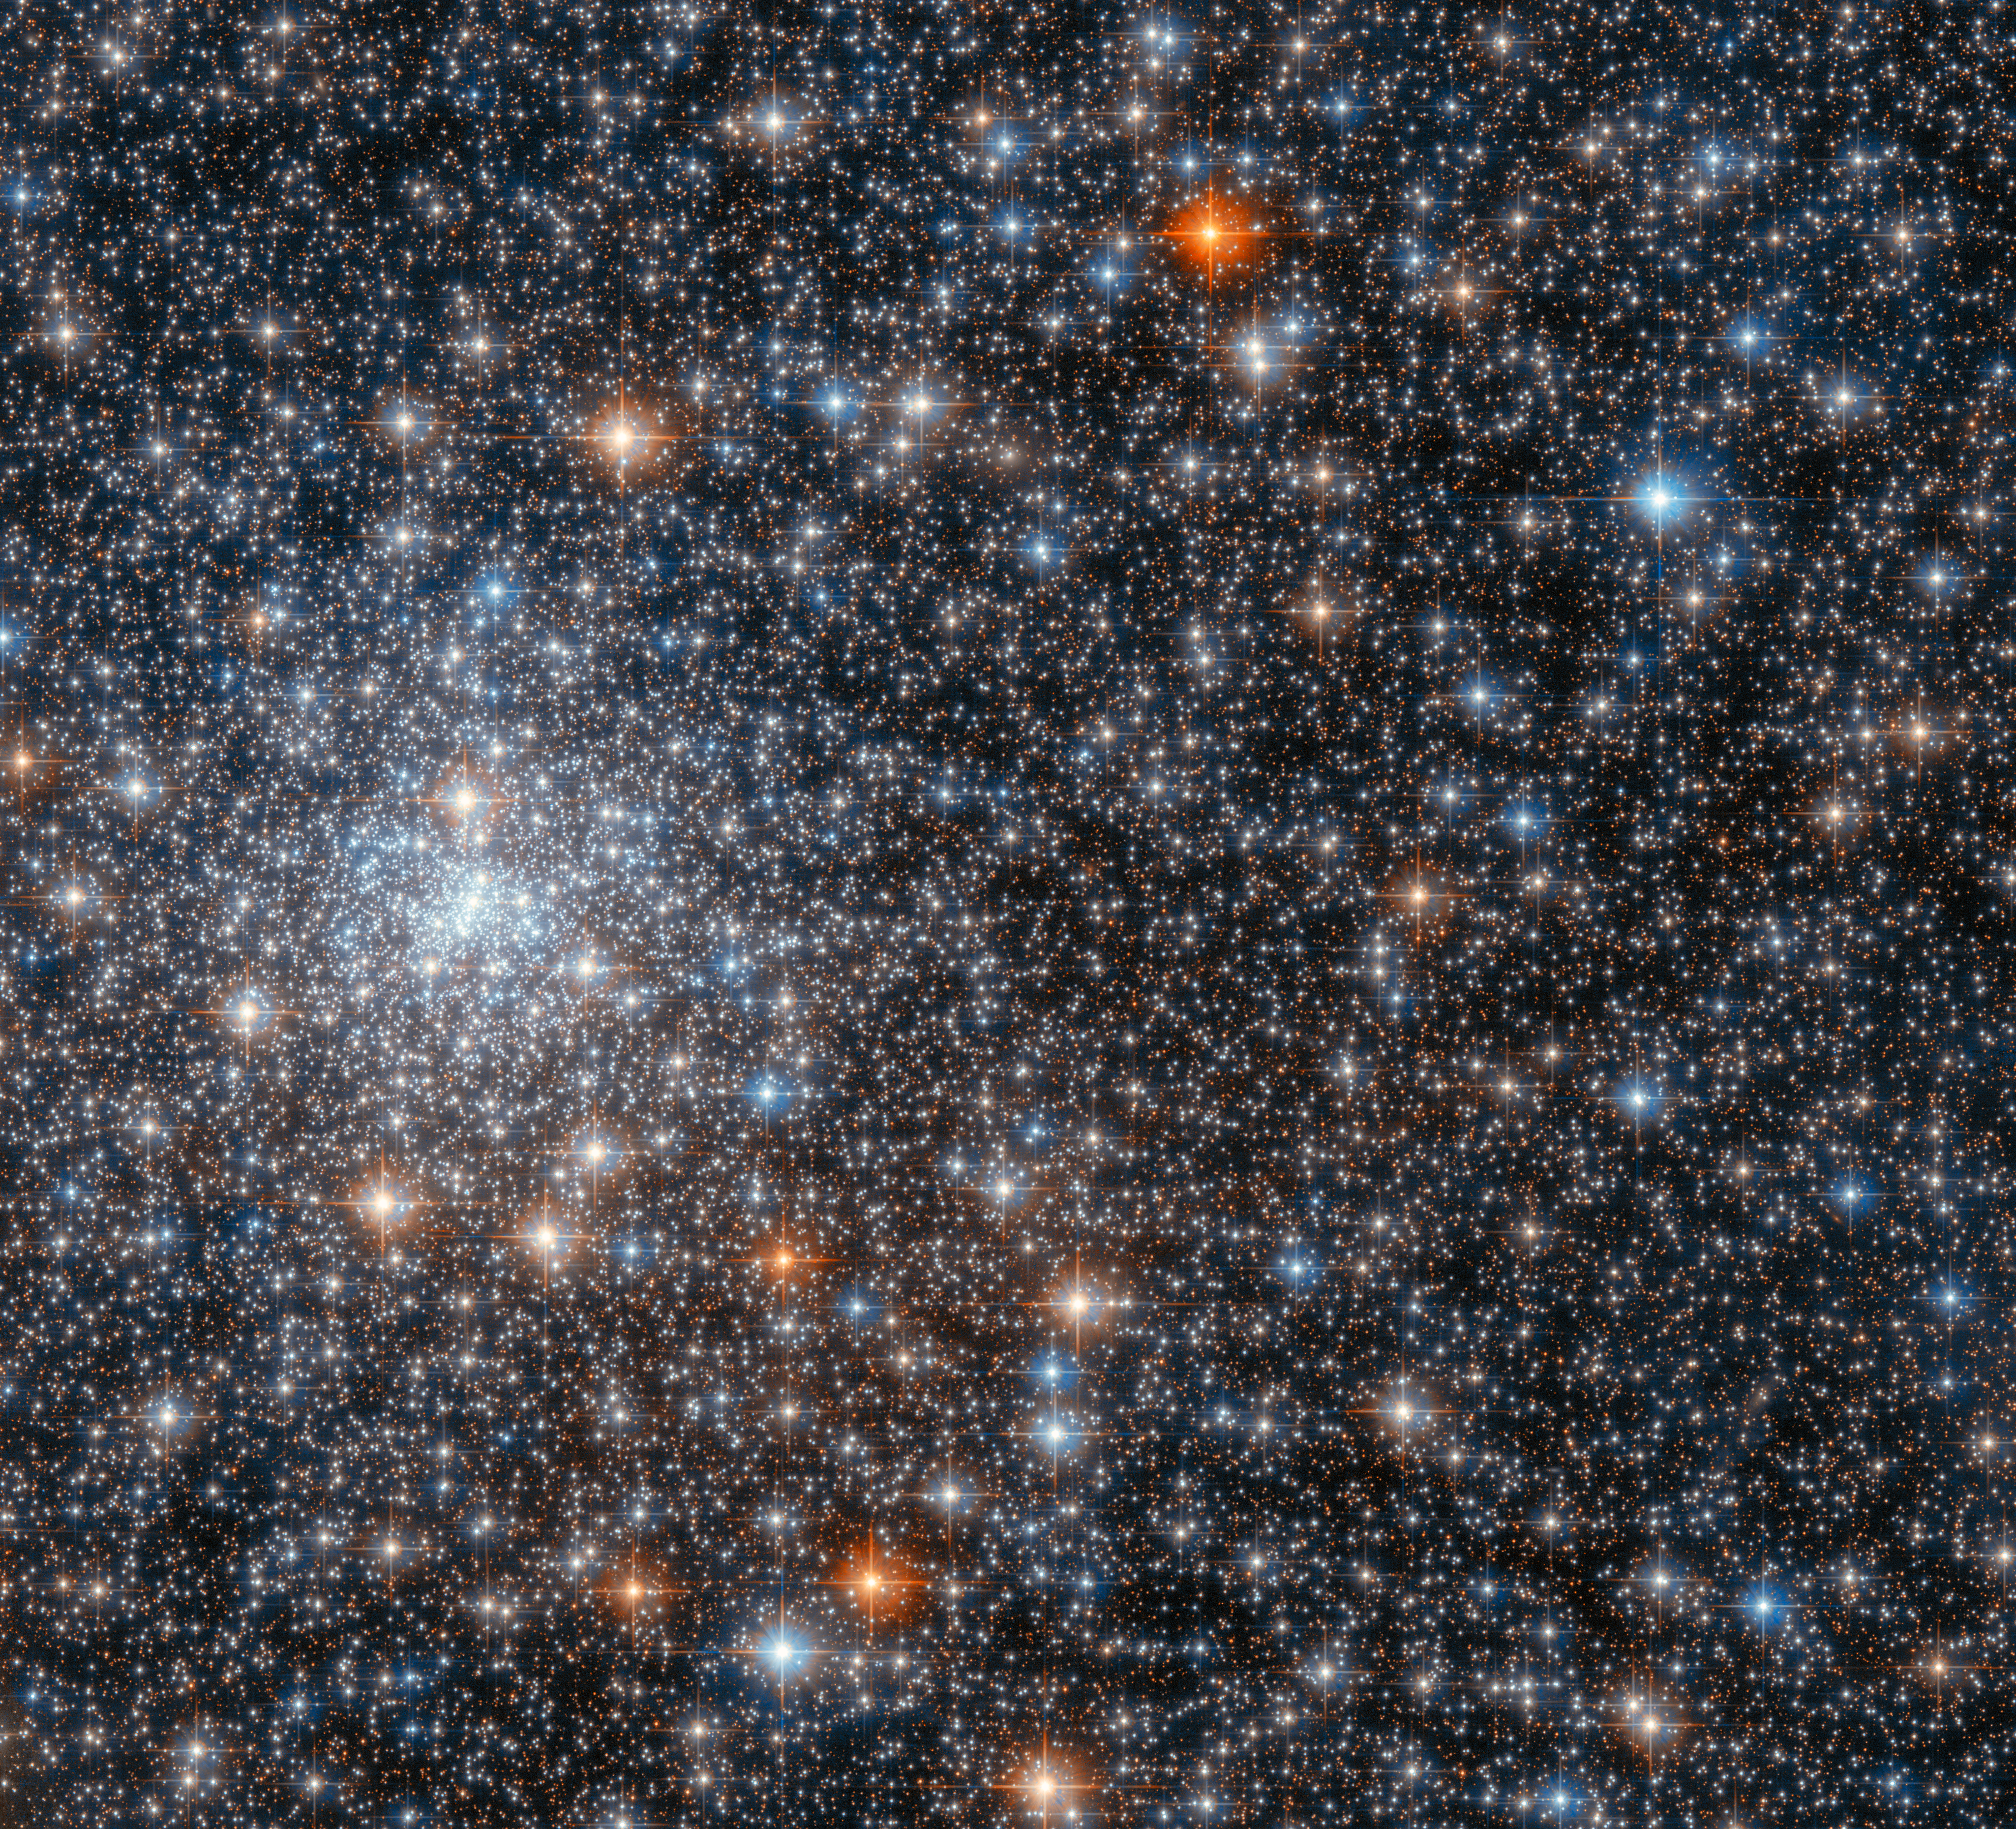

Hubble Spies a Glittering Gathering of Stars

This glittering gathering of stars is the globular cluster NGC 6558, and it was captured by the NASA/ESA Hubble Space Telescope’s Advanced Camera for Surveys. NGC 6558 is closer to the centre of the Milky Way than Earth is, and lies about 23 000 light years away in the constellation Sagittarius.

Globular clusters like NGC 6558 are tightly bound collections of tens of thousands to millions of stars, and they can be found in a wide range of galaxies. As this observation shows, the stars in globular clusters can be densely packed; this image is thronged with stars in a rich variety of hues. Some of the brightest inhabitants of this globular cluster are surrounded by prominent diffraction spikes, which are imaging artefacts caused by starlight interacting with the inner workings of Hubble.

Globular clusters equip astronomers with interesting natural laboratories in which to test their theories, as all the stars in a globular cluster formed at approximately the same time with similar initial composition. These stellar clusters therefore provide unique insights into how different stars evolve under similar conditions. This image comes from a set of observations investigating globular clusters in the inner Milky Way. Astronomers were interested in studying these globular clusters to gain greater insight into how globular clusters in the inner Milky Way form and evolve.

Credit: ESA/Hubble & NASA, R. Cohen